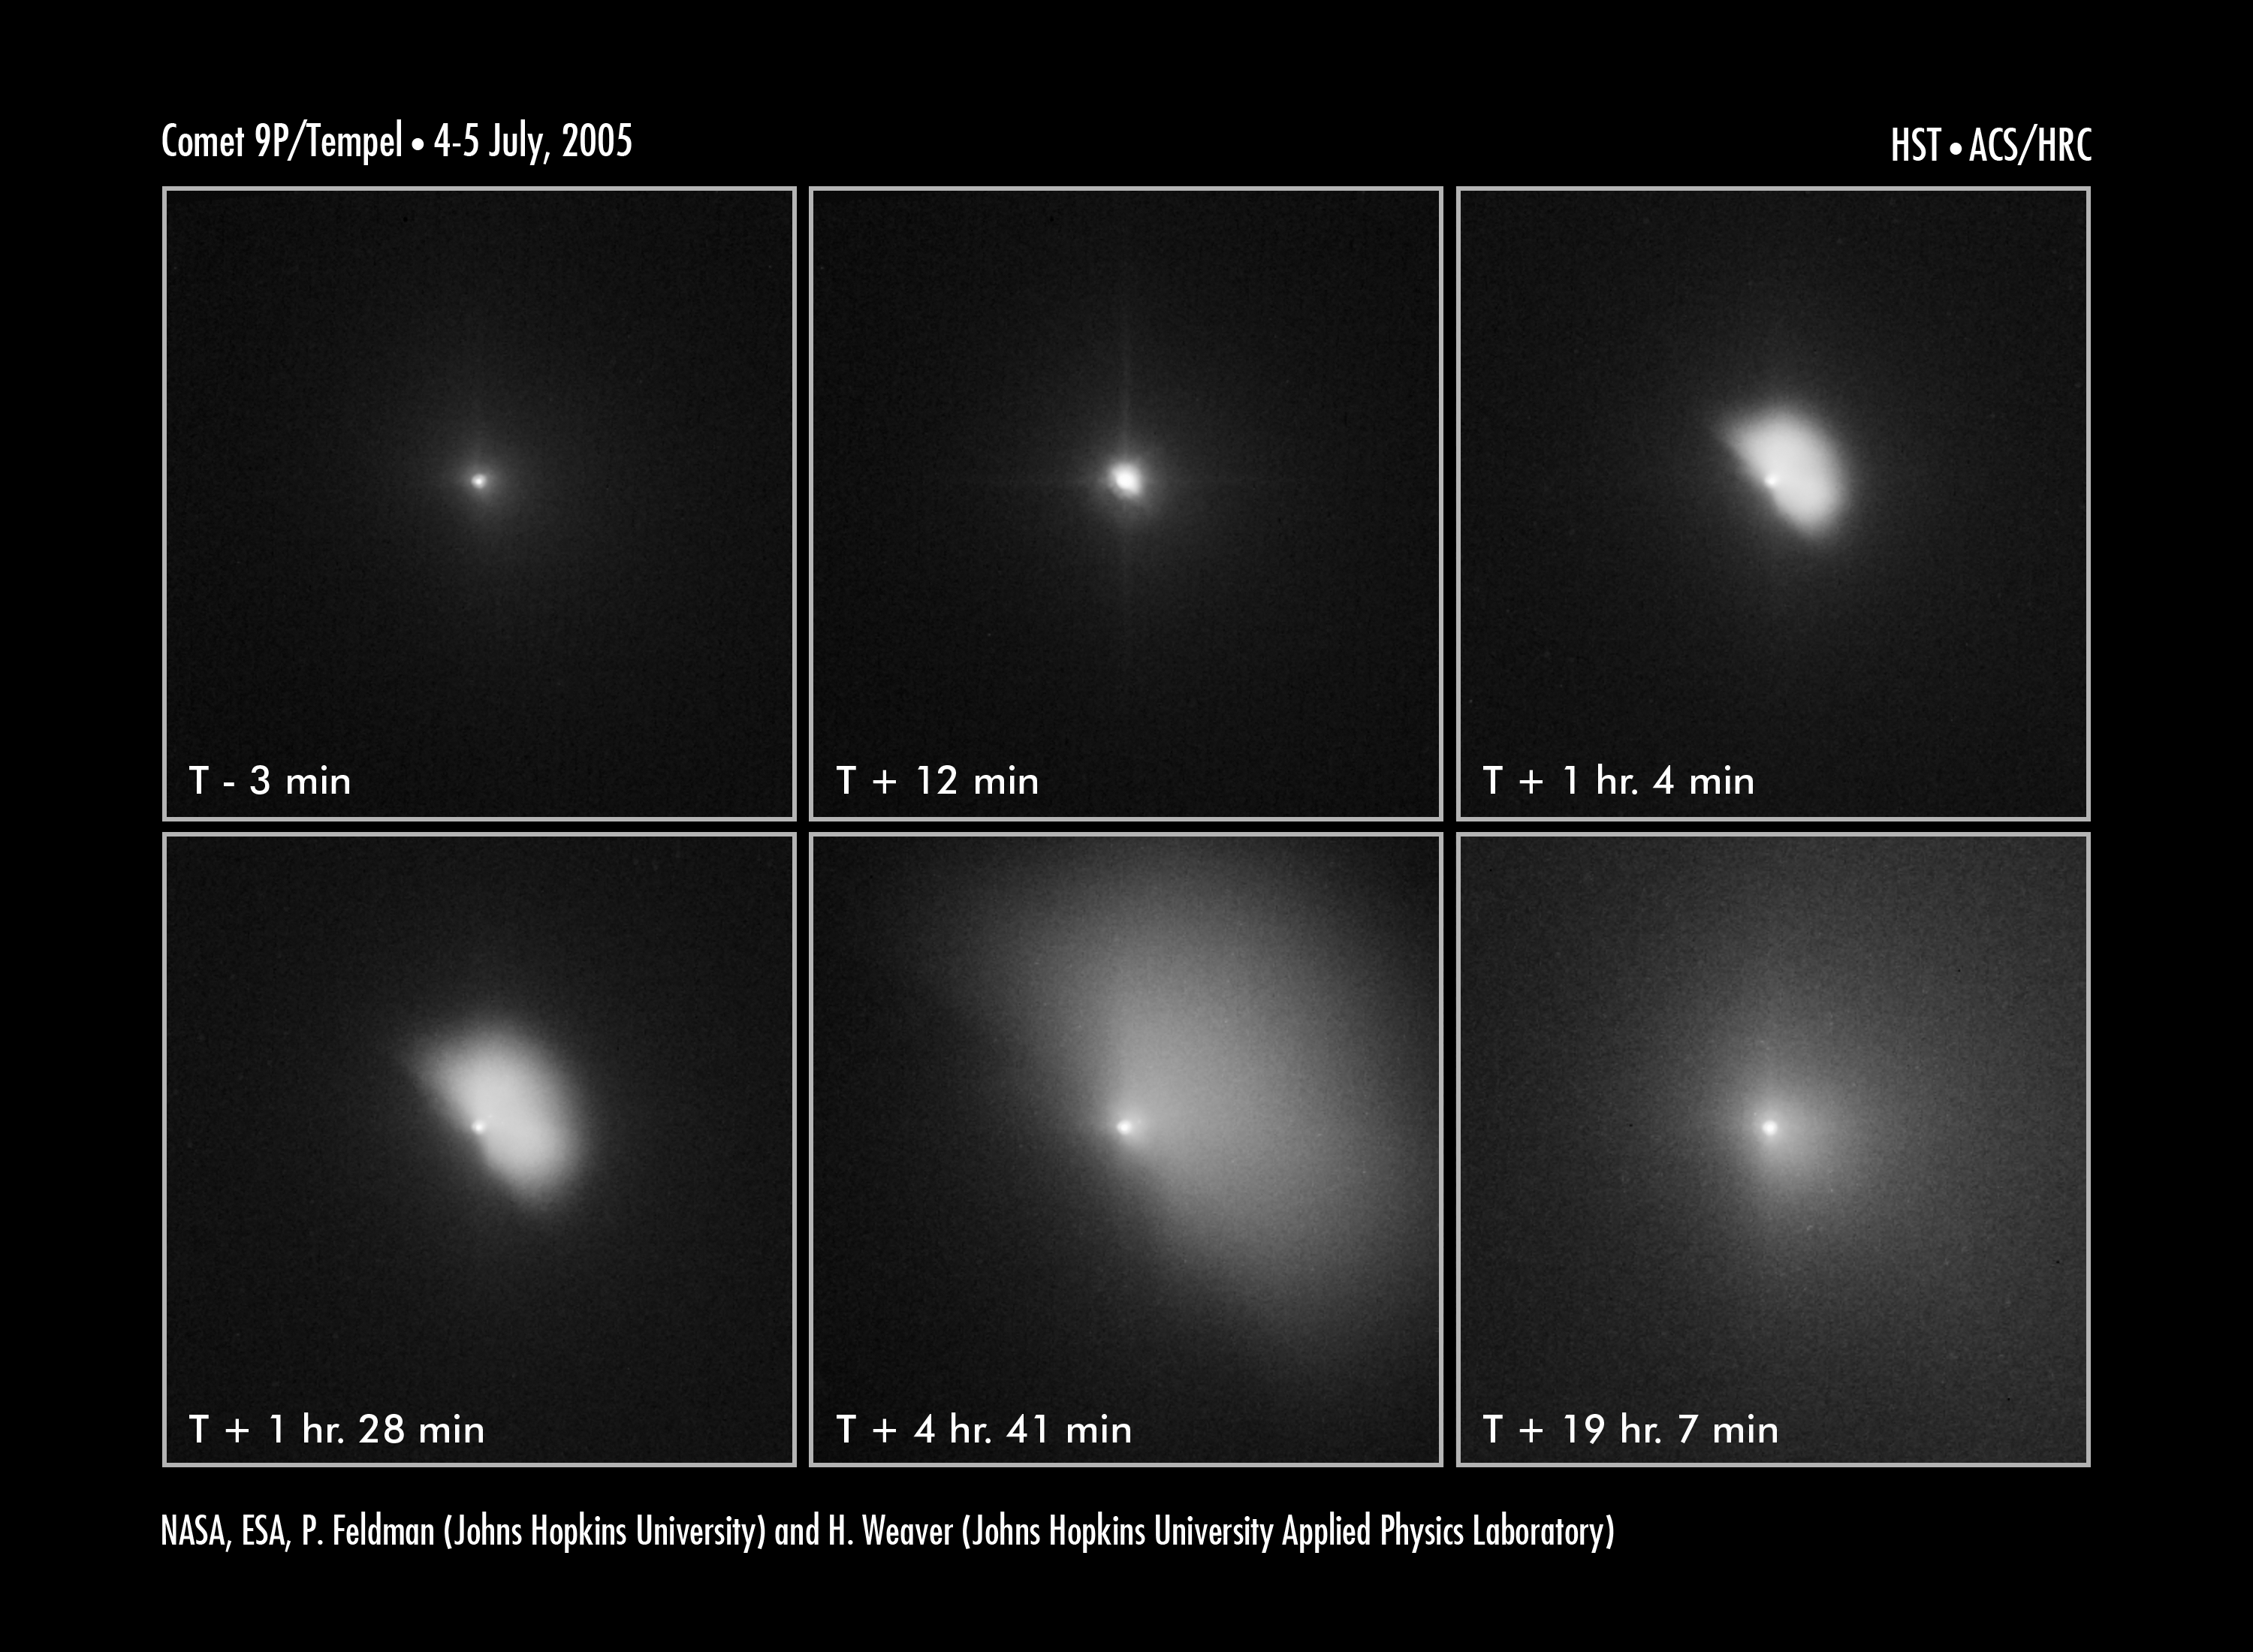

Hubble captures deep impact's collision with a comet

This series of Hubble Space Telescope images captures the ejection of a bright plume of dust following the July 4 collision between an 370 kilogram projectile released by the Deep Impact spacecraft and comet 9P/Tempel 1. The image sequence dramatically shows the evolution of material that was blasted off the comet as it expands and diffuses into interplanetary space.

The sequence of images shows the fan-shaped ejecta expanding at 720 kilometres an hour over a 24-hour period following impact. The upper-left image shows the comet several minutes before impact. The encounter occurred at 7:52 CEST 4 July.

The middle, top image shows that just 12 minutes after the collision, the innermost coma of dust appears 10 times brighter than in the pre-impact photo. The impact caused a brilliant flash of light and a constant increase in the brightness of the inner cloud of dust.

The Hubble telescope continued to monitor the comet, snapping another image [upper right] an hour after the encounter. In this photo, the dust ejected during the impact is expanding outward in the shape of a fan. The debris extends about 720 kilometres from the nucleus. This expansion continues through the bottom series of photos. In the bottom, centre photo, the cloud is 3,200 kilometres across. The last picture in the sequence shows the cloud becoming more diffuse.

The potato-shaped comet is about 13 kilometres long and 4 kilometres wide. Tempel 1's nucleus is too small for the Hubble telescope to resolve. Instead, the bright central region is a combination of light reflected from the nucleus and from dust in the immediate region around the nucleus.

The visible-light images were taken by the Advanced Camera for Surveys' High Resolution Camera.

Credit: NASA, ESA, P. Feldman (Johns Hopkins University), and H. Weaver (Johns Hopkins University Applied Physics Lab)